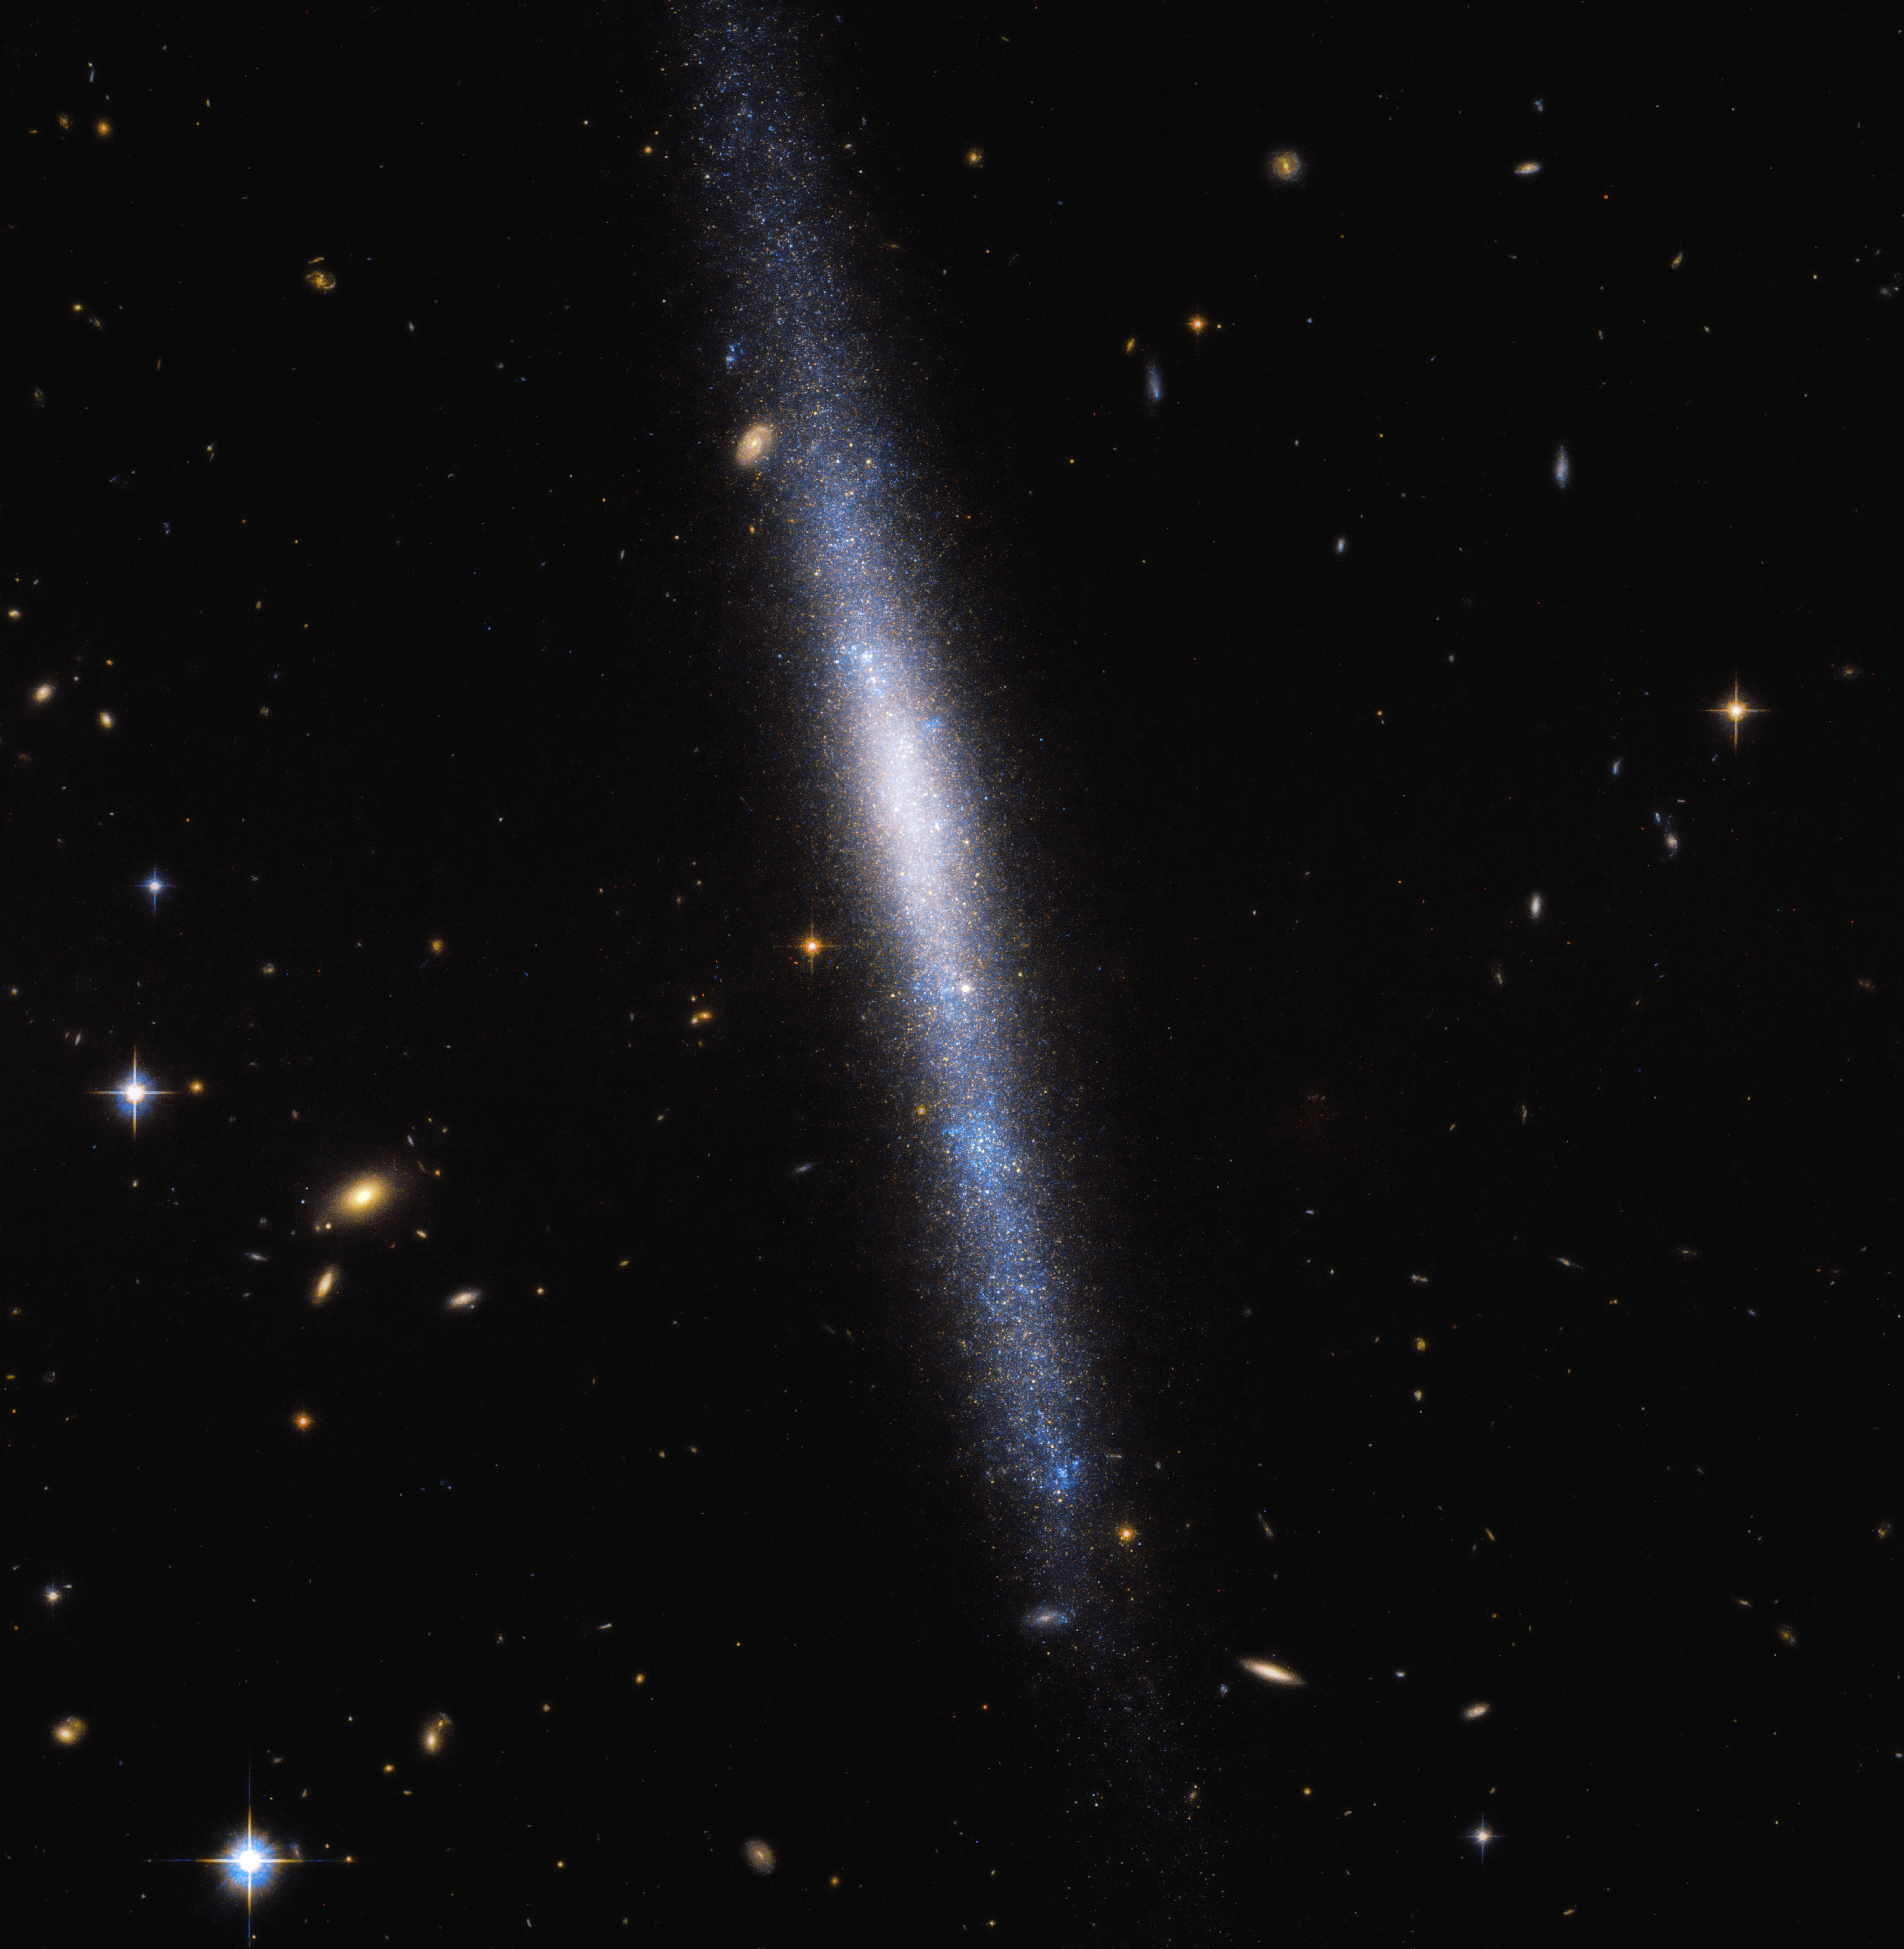

A Waterfall of Stars

The galaxy UGCA 193, seen here by the NASA/ESA Hubble Space Telescope, is a galaxy in the constellation of Sextans (The Sextant). Looking rather like a waterfall, UGCA 193 appears to host many young stars, especially in its lower portion, creating a striking blue haze and the sense that the stars are falling from “above”.

The blue colour of UGCA 193 indicates the stars that we see are hot — some with temperatures exceeding 6 times that of our Sun. We know that cooler stars appear to our eyes more red, and hotter stars appear more blue. As the mass and surface temperature of a star, and therefore its colour, are linked, heavier stars are able to “burn” at higher temperatures resulting in a blue glow from their surface.

Credit: ESA/Hubble & NASA, R. Tully Acknowledgement: Gagandeep Anand